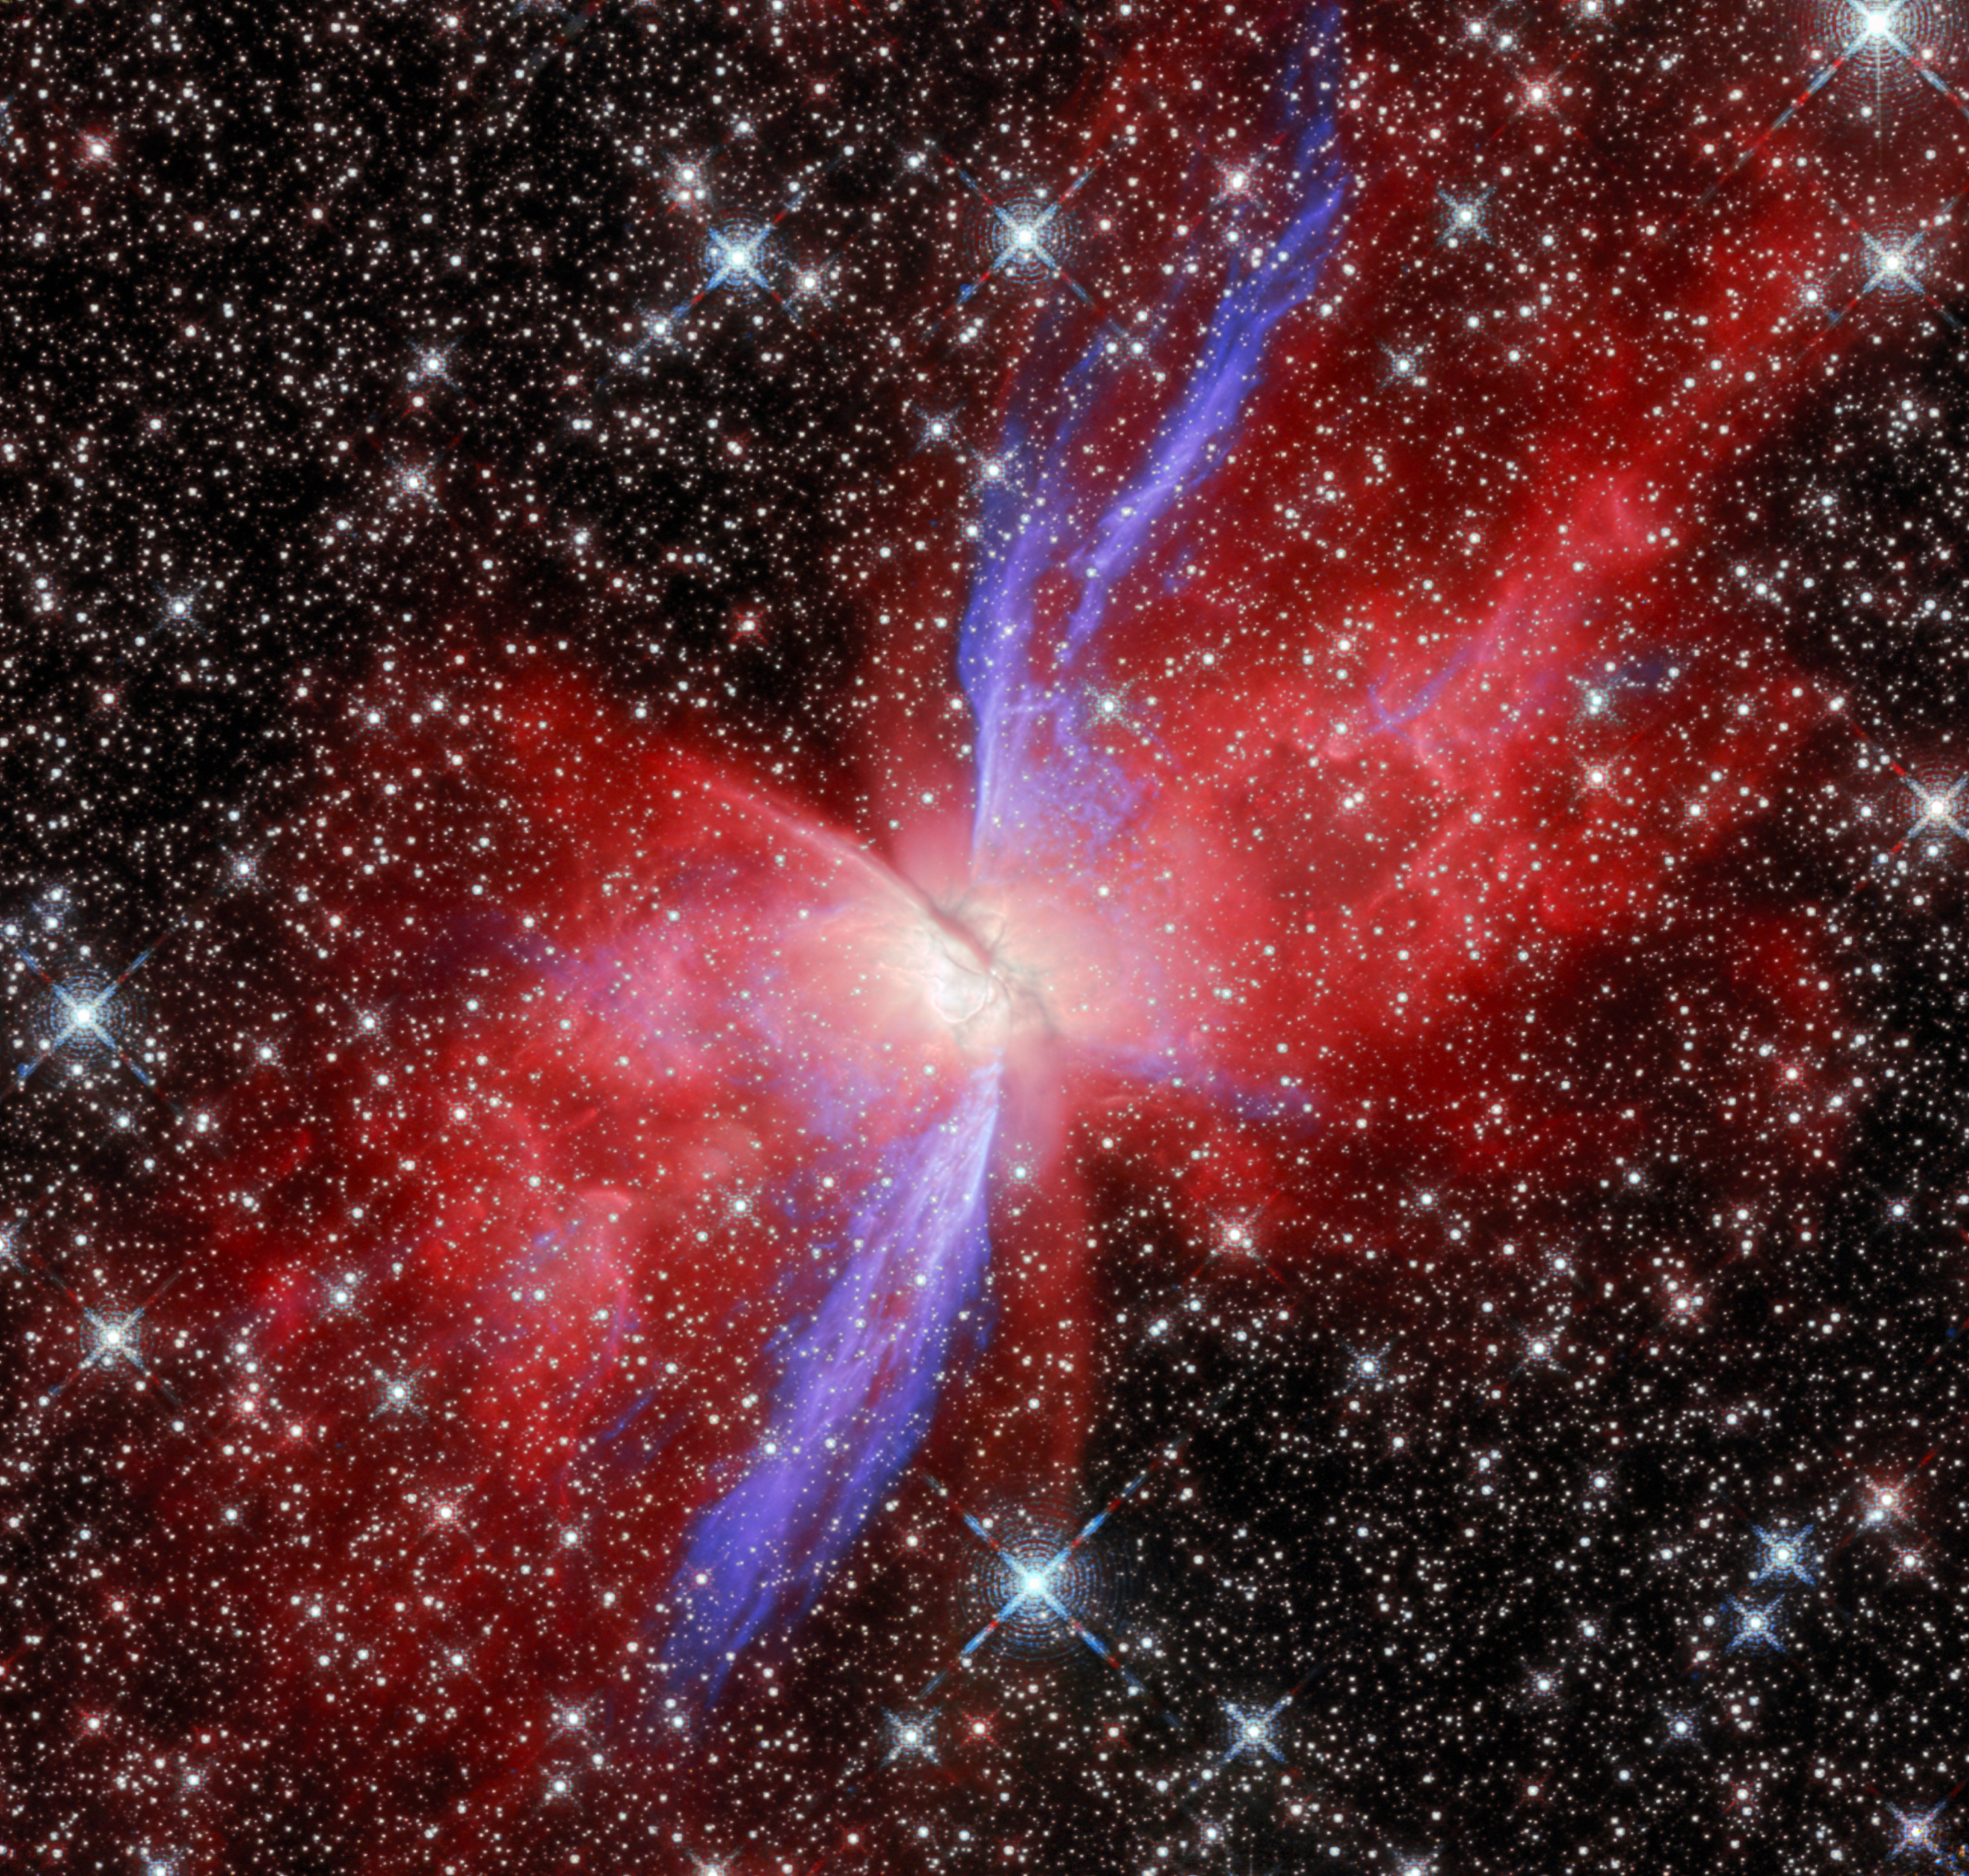

Butterfly Nebula NGC 6302 (Near-infrared Hubble image)

This view of the Butterfly Nebula, NGC 6302, comes from the NASA/ESA Hubble Space Telescope. Compared to its appearance in visible light, the Butterfly Nebula looks gauzy at near-infrared wavelengths. The red colour that’s most prevalent in this view shows light from hydrogen, while green and blue come from iron that has been ionised.

This Hubble image highlights the Butterfly Nebula’s bipolar shape, showing how its two lobes spread in opposite directions, forming the ‘wings’ of the butterfly. A dark band of dusty gas poses as the butterfly’s ‘body’. This band is actually a doughnut-shaped torus that’s being viewed from the side, hiding the nebula’s central star - the ancient core of a Sun-like star that energises the nebula and causes it to glow. The dusty doughnut may be responsible for the nebula’s insectoid shape by preventing gas from flowing outward from the star equally in all directions.

Credit: ESA/Webb, NASA & CSA, J. Kastner, M. Zamani (ESA/Webb)